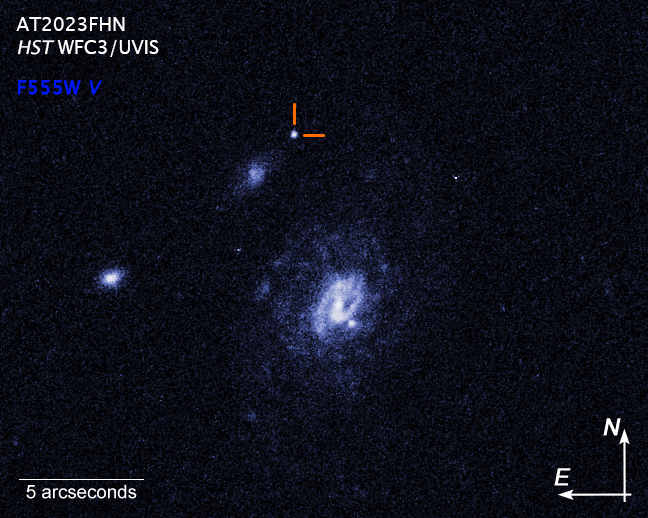

Hubble image of a Luminous Fast Blue Optical Transient (LFBOT) - annotated

A Hubble Space Telescope image of a Luminous Fast Blue Optical Transient (LFBOT) designated AT2023fhn, indicated by pointers. It shines intensely in blue light and evolves rapidly, reaching peak brightness and fading again in a matter of days, unlike supernovae which take weeks or months to dim. Only a handful of previous LFBOTs have been discovered since 2018. The surprise is that this latest transient, seen in 2023, lies at a large offset from both the barred spiral galaxy at right and the dwarf galaxy to the upper left. Only Hubble could pinpoint its location. And, the results are leaving astronomers even more confounded because all previous LFBOTs have been found in star-forming regions in the spiral arms of galaxies. It’s not clear what astronomical event would trigger such a blast far outside of a galaxy.

Credit: NASA, ESA, STScI, A. Chrimes (Radboud University)